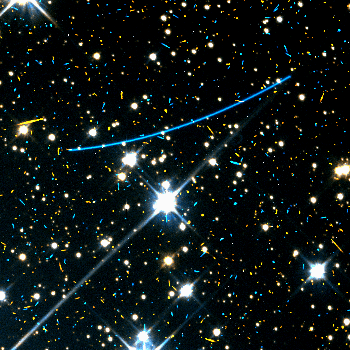

Serendipitously Discovered Asteroids

Hubble captured a bright asteroid, with a visual magnitude of 18.7, roaming in the constellation Centaurus. Background stars are shown in white, while the asteroid trail is depicted in blue at top center. The trail has a length of 19 arc seconds. This asteroid has a diameter of one and one-quarter miles (2 kilometers), and was located 87 million miles from Earth and 156 million miles from the sun. Numerous orange and blue specks in this image and the following two images were created by cosmic rays, energetic subatomic particles that struck the camera's detector.

Credit: R. Evans and K. Stapelfeldt (Jet Propulsion Laboratory) and NASA/ESA